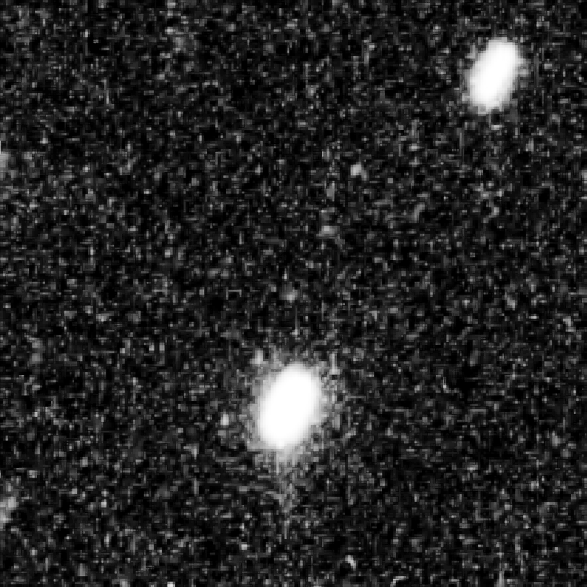

Hubble Tracks Kuiper Belt Object

A Kuiper Belt object (KBO) visible in multiple exposures taken with the NASA/ESA Hubble Space Telescope.

Hubble tracked the KBO moving against the crowded background field of stars in the constellation Sagittarius. The object is no bigger than 43 miles across, and it is a deep-freeze relic of what the outer Solar System was like 4.6 billion years ago, during the period when the Sun formed.

As the KBO orbits the Sun, its position noticeably shifts between exposures taken approximately 10 minutes apart.

A Hubble survey has uncovered three KBOs, ranging from 43 to 56 kilometres across, that are potentially reachable by NASA's New Horizons spacecraft after it passes by Pluto in mid-2015.

Credit: NASA, ESA SwRI, JHU/APL, and the New Horizons KBO Search Team